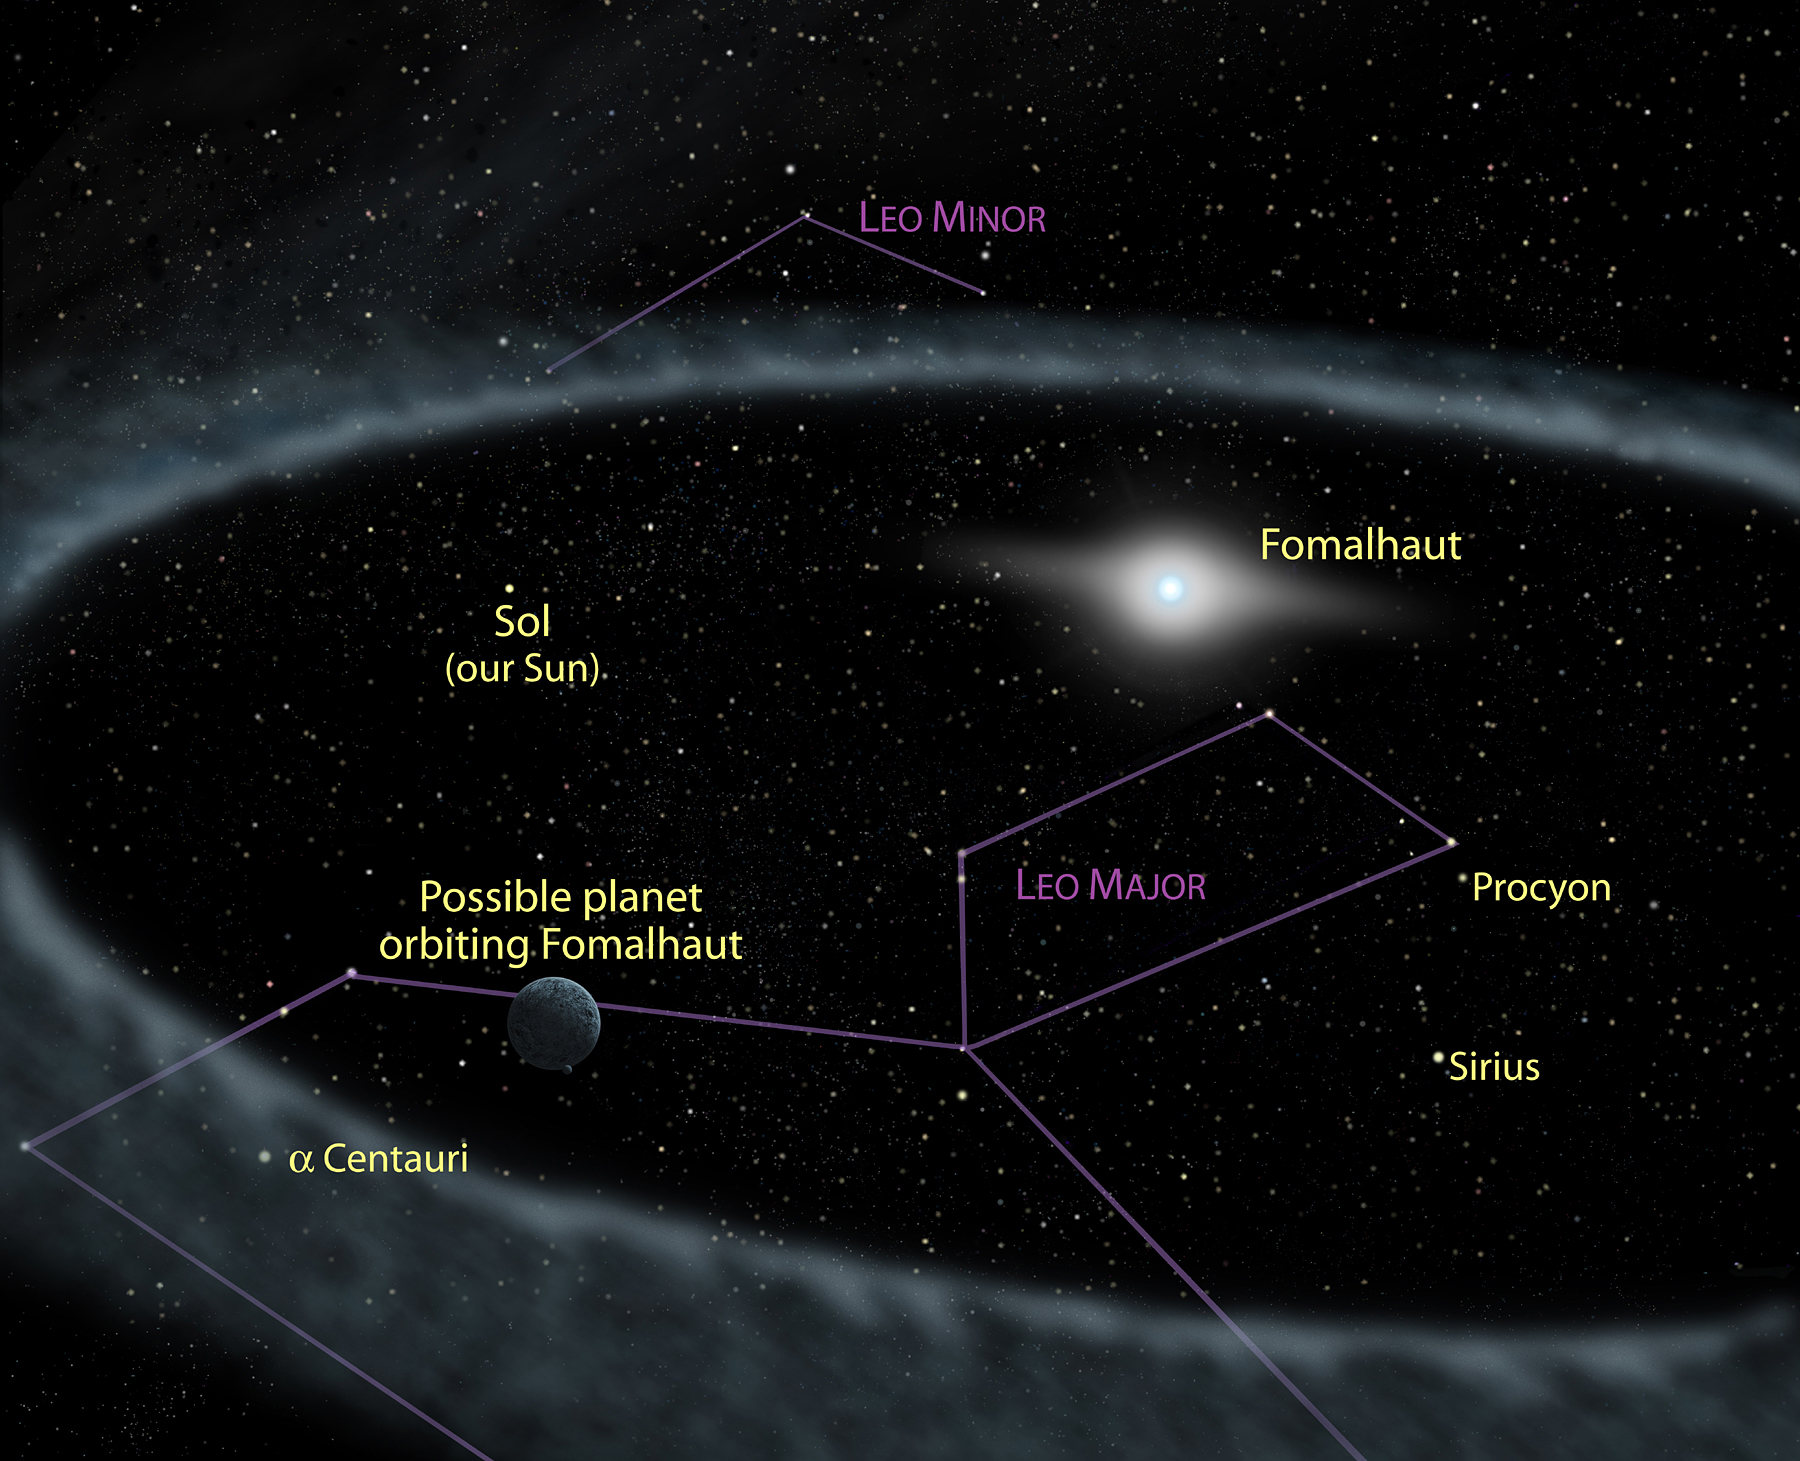

Fomalhaut ring artwork - annotated

This illustration of a ring of debris encircling the star Fomalhaut shows the putative planet orbiting inside the ring. In this picture, the background stars and constellations are identified. This is not the same view we would see from Earth, because Fomalhaut is 25 light-years from the Sun. Nevertheless, the constellations are still recognizable. The Sun, for example, is a bright star in the constellation Leo. Other well-known stars such as Alpha Centauri, Sirius, and Procyon also can be seen.

Credit: NASA, ESA and A. Feild (STScI)